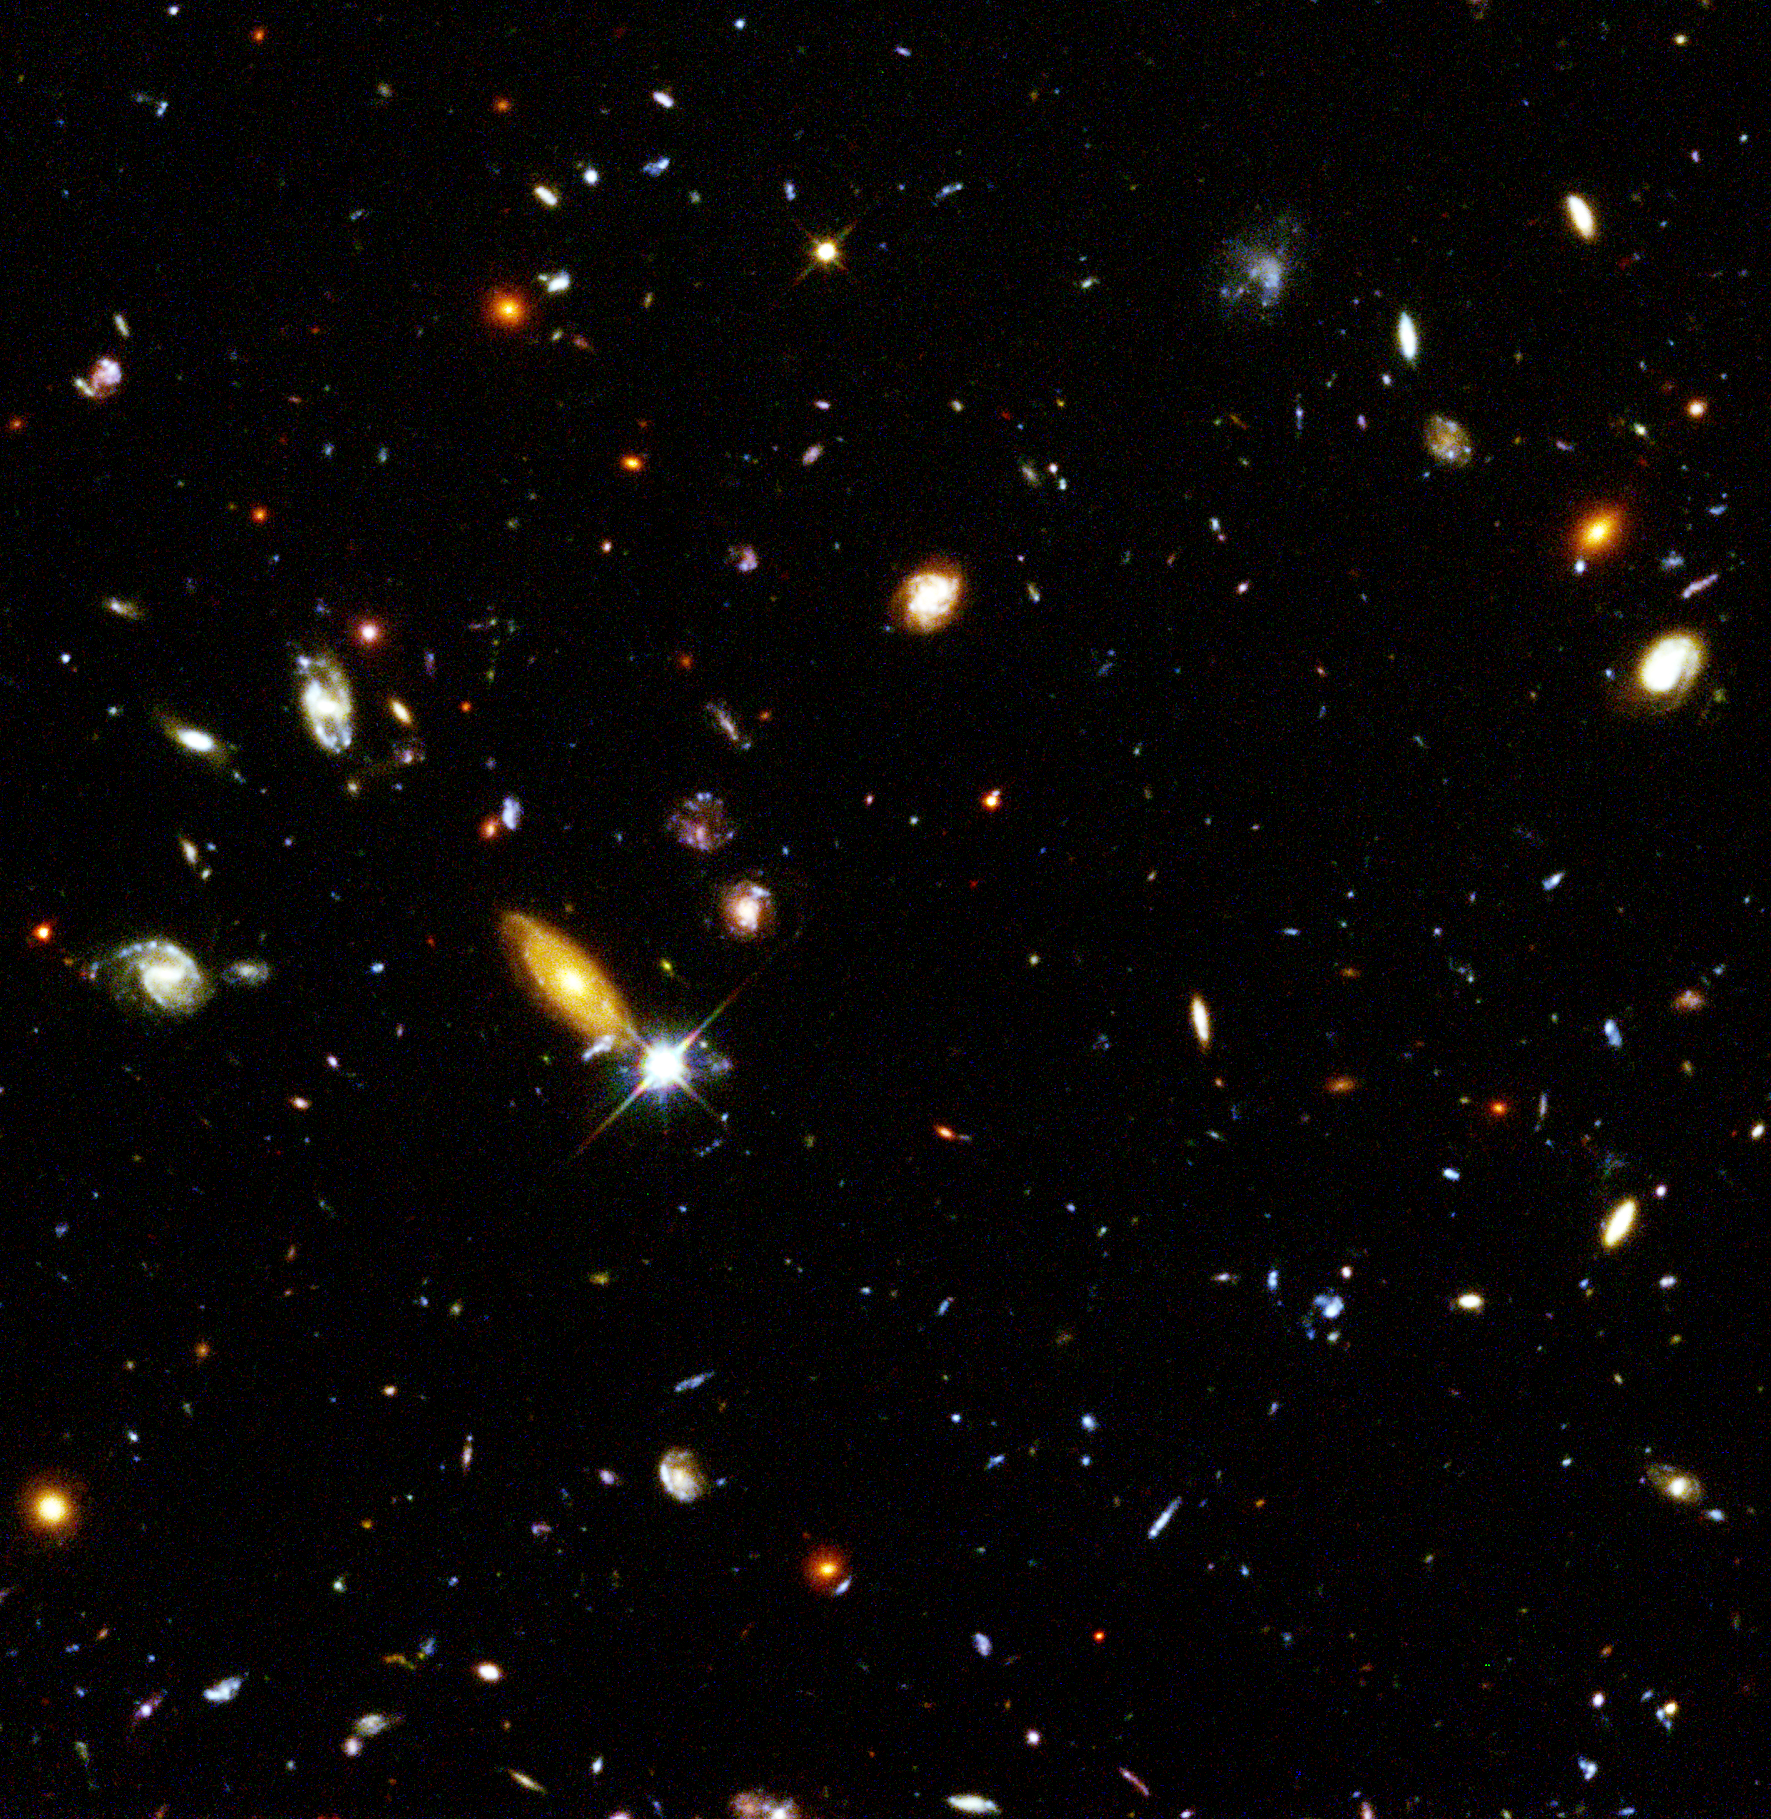

The Hubble Deep Field

Several hundred never before seen galaxies are visible in this 'deepest-ever' view of the universe, called the Hubble Deep Field (HDF), made with the Hubble Space Telescope.

Besides the classical spiral and elliptical shaped galaxies, there is a bewildering variety of other galaxy shapes and colours that are important clues to understanding the evolution of the universe. Some of the galaxies may have formed less that one billion years after the Big Bang.

Credit: Robert Williams and the Hubble Deep Field Team (STScI) and NASA/ESA